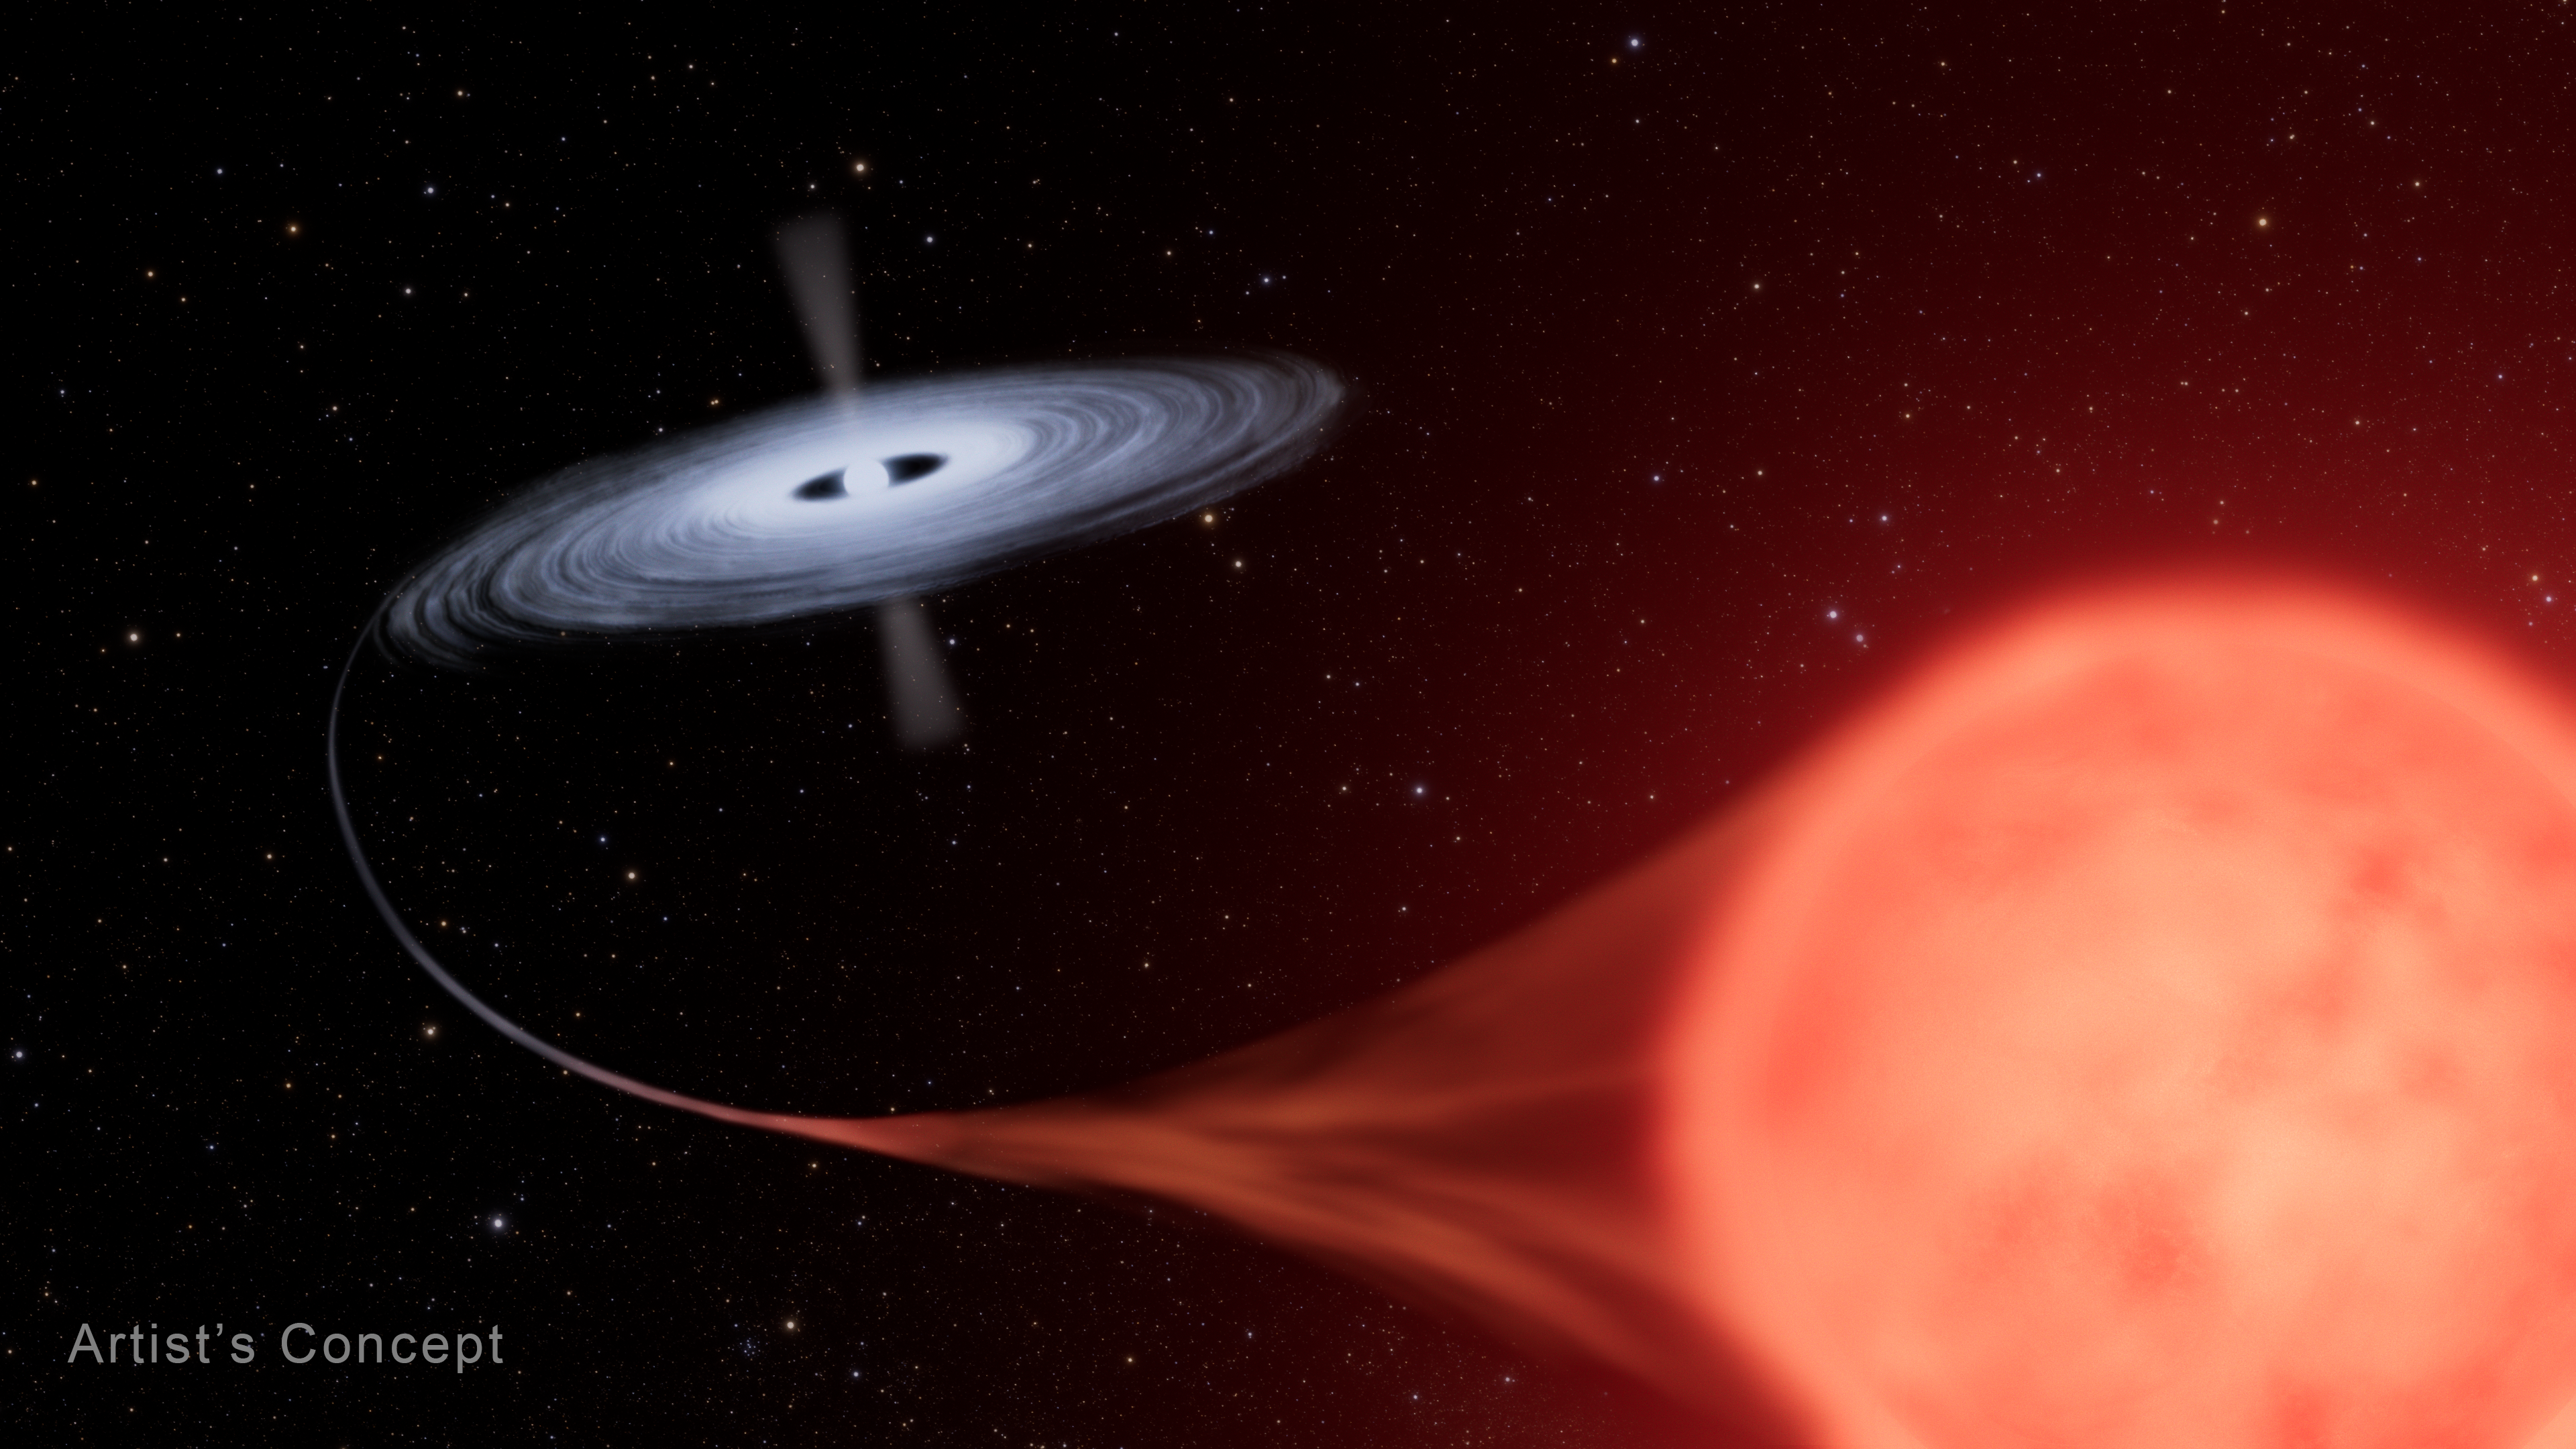

Nova in binary star system HM Sagittae (artist's concept)

Astronomers have used new data from the NASA/ESA Hubble Space Telescope and the retired NASA SOFIA observatory (Stratospheric Observatory for Infrared Astronomy) as well as archival data from other missions to revisit one of the strangest binary star systems in our galaxy – 40 years after it burst onto the scene as a bright and long-lived nova. A nova is a star that suddenly increases its brightness tremendously and then fades away to its former obscurity, usually in a few months or years.

Between April and September 1975, the binary system HM Sagittae (HM Sge) grew 250 times brighter. Even more unusual, it did not rapidly fade away as novae commonly do, but has maintained its luminosity for decades. Recently, observations show that the system has gotten hotter, but paradoxically faded a little.

The 2021 ultraviolet data from Hubble showed a strong emission line of highly ionised magnesium that was not present in earlier published spectra from 1990. Its presence shows that the estimated temperature of the white dwarf and accretion disk increased from less than 220,000 degrees Celsius in 1989 to greater than 250,000 degrees Celsius now. The highly ionised magnesium line is one of many seen in the UV spectrum, which analysed together will reveal the energetics of the system, and how it has changed in the last three decades.

With data from NASA's flying telescope SOFIA, which retired in 2022, the team was able to detect the water, gas, and dust flowing in and around the system. Infrared spectral data shows that the giant star, which produces copious amounts of dust, returned to its normal behaviour within only a couple years of the explosion, but also that it has dimmed in recent years, which is another puzzle to be explained. With SOFIA astronomers were able to see water moving at around 28 kilometres per second, which they suspect is the speed of the sizzling accretion disk around the white dwarf. The bridge of gas connecting the giant star to the white dwarf must presently span about 3.2 billion kilometres.

This artist’s concept shows the nova system HM Sagittae (HM Sge), where a white dwarf star is pulling material from its red giant companion. This forms a blazing hot disk around the dwarf, which can unpredictably undergo a spontaneous thermonuclear explosion as the infall of hydrogen from the red giant grows denser and reaches a tipping point. These fireworks between companion stars are fascinating to astronomers by yielding insights into the physics and dynamics of stellar evolution in binary systems.

Learn more about these results here.

Credit: NASA, ESA, L. Hustak (STScI)